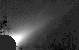

Beta Pictoris Edge-On

The disk appears four times thicker in a ground-based image of Beta Pictoris than in a Hubble Space Telescope image due to the limitation of atmospheric seeing.

Credit: Paul Kalas (University of Hawaii 2.2-m telescope, Mauna Kea)